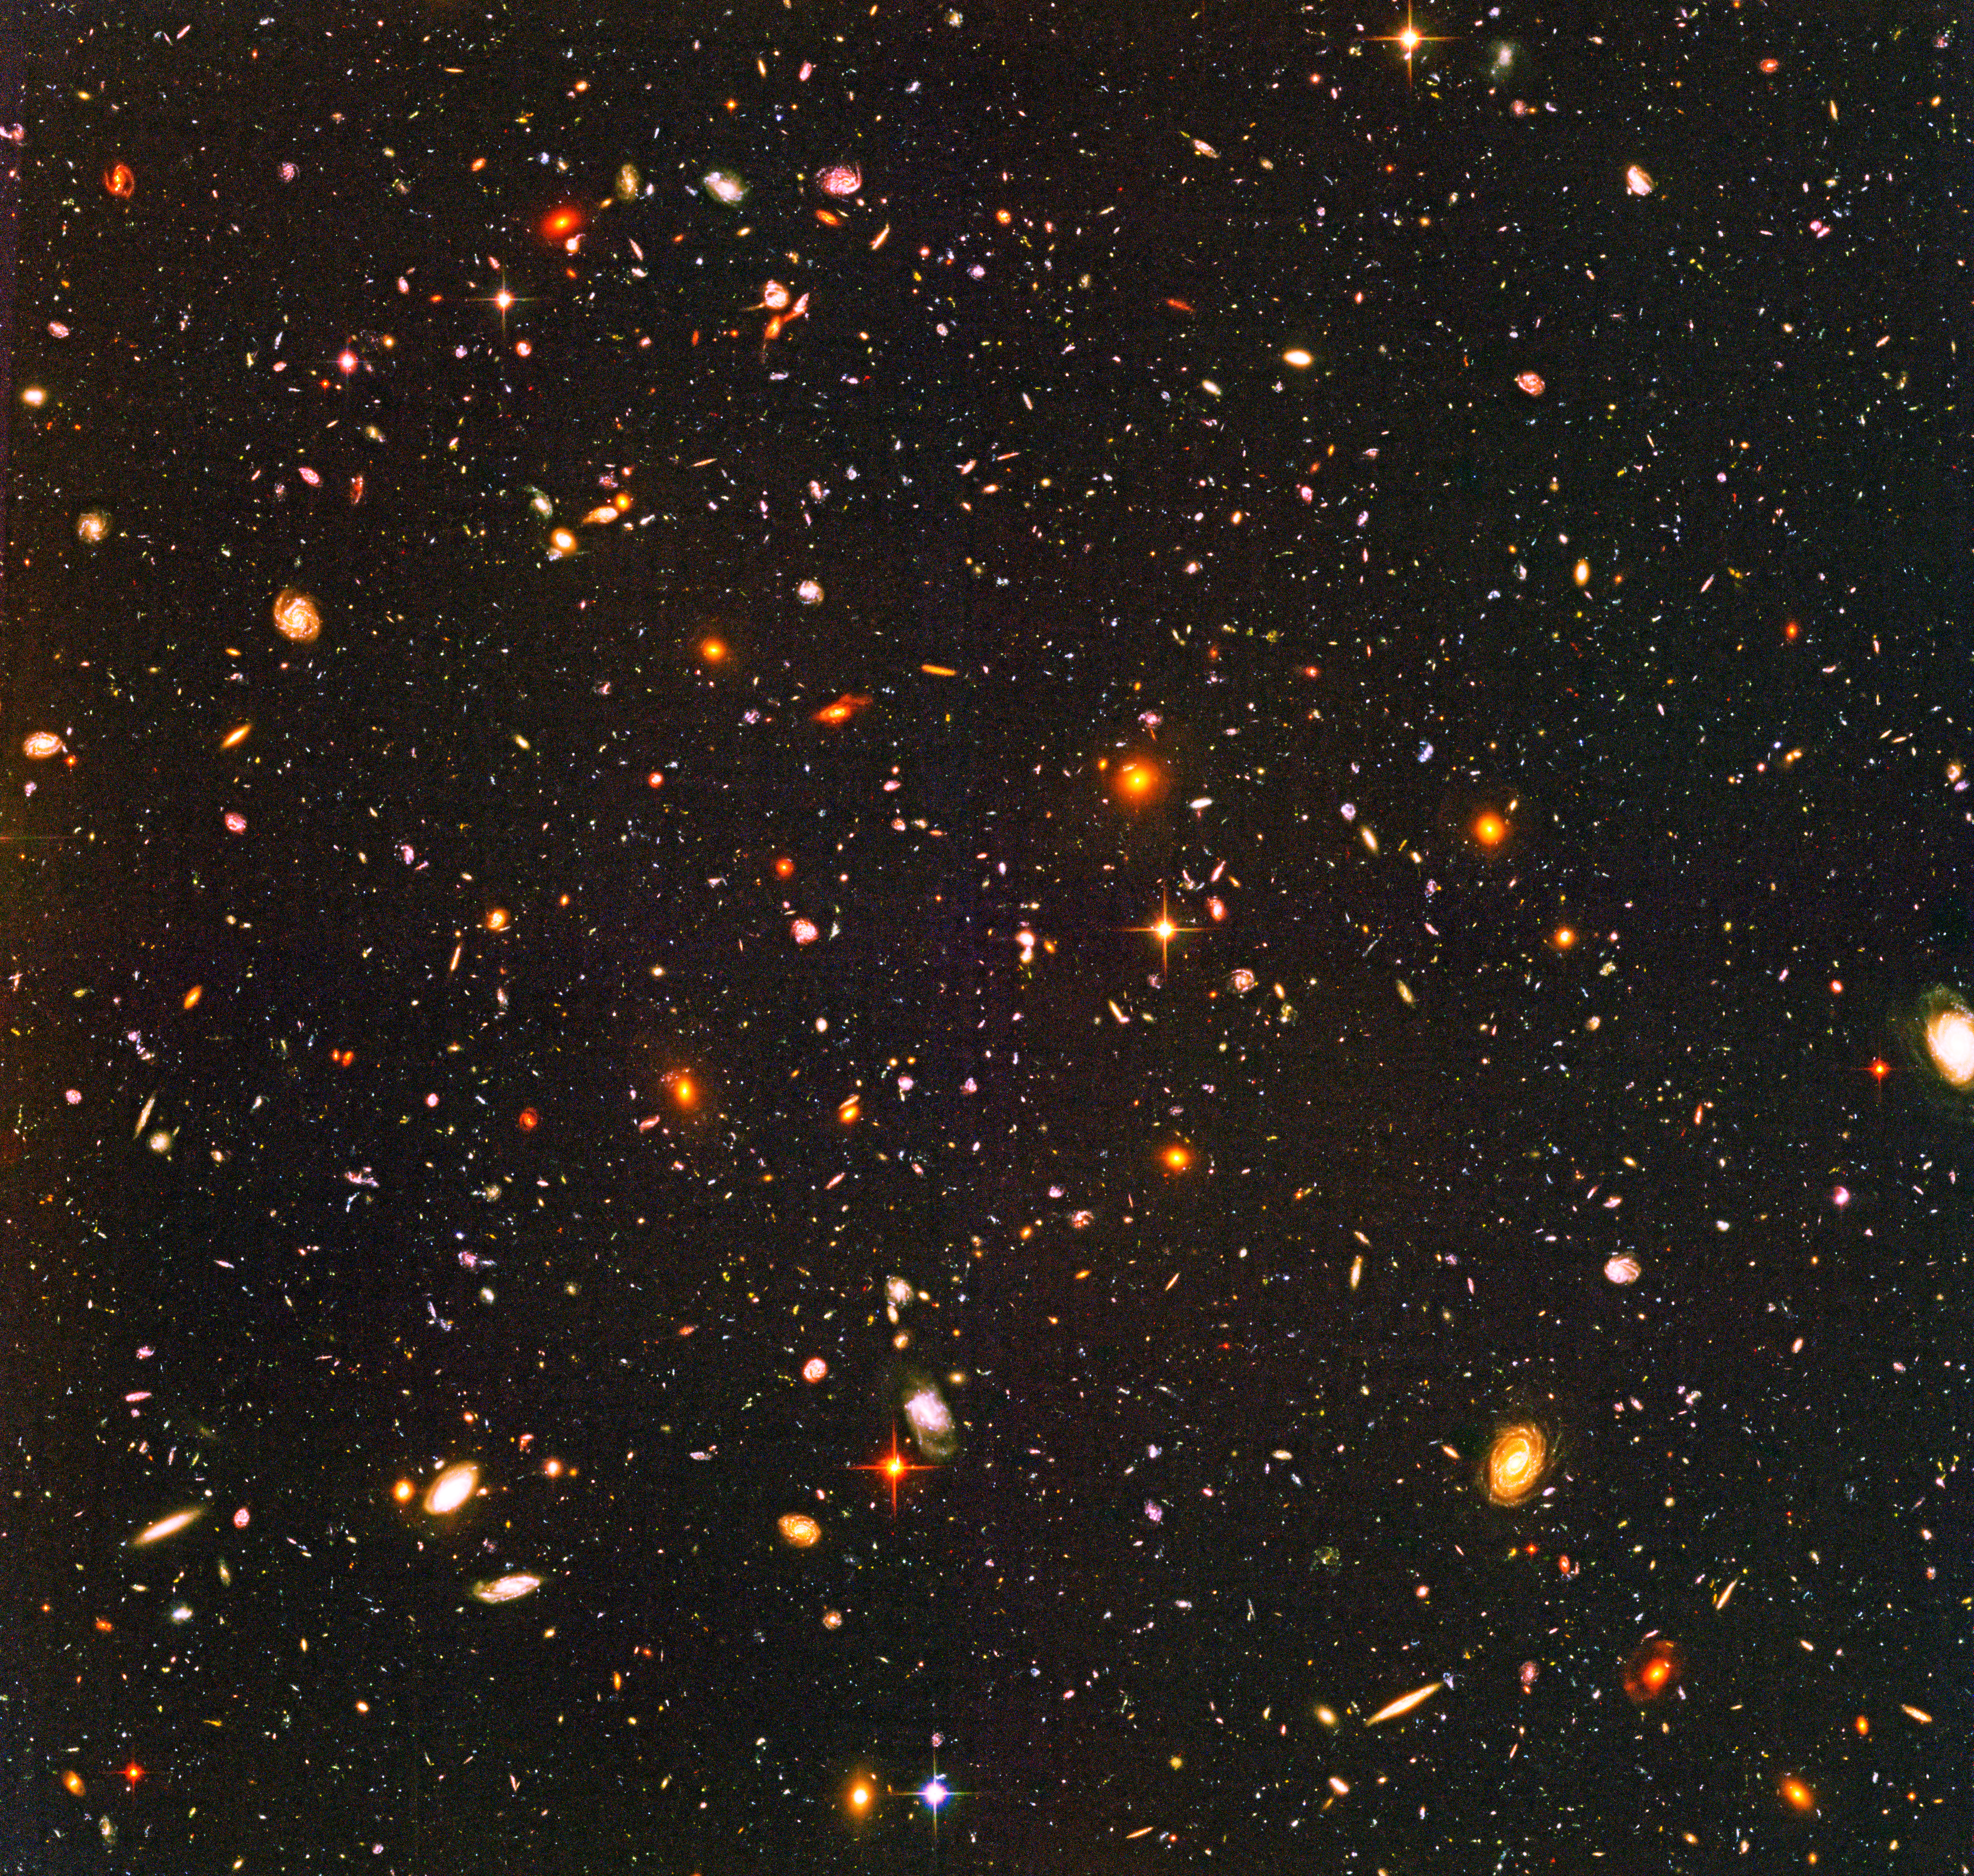

Most-Distant Galaxy Candidates in the Hubble Ultra Deep Field

Detailed analyses of mankind's deepest optical view of the universe, the Hubble Ultra Deep Field (HUDF), by several expert teams have at last identified what may turn out to be some of the earliest star-forming galaxies. The sensitivity of Hubble's Advanced Camera for Surveys (ACS), combined with the penetrating power of the Near Infrared Camera and Multi-Object Spectrometer (NICMOS), finally revealed these long-sought faint galaxies. The HUDF shows that close to a billion years after the big bang the early universe was filled with dwarf galaxies, but no fully formed galaxies like our Milky Way. After careful analysis, they have been sorted out as between 54 and 108 dim, red smudges sprinkled across the HUDF image. This image shows the full sample of candidates circled in green. Three enlargements at right show several dwarf objects that are at the limits of Hubble's present instrument capabilities. The HUDF is a small region of sky in the direction of the southern constellation Fornax. The faintest objects are less than one four-billionth the brightness of stars that can be seen with the naked eye. Their light has taken nearly 13 billion years to reach Earth, and so these objects represent some of the earliest star-forming galaxies to form in the universe.

Credit: NASA, ESA, R. Windhorst (Arizona State University) and H. Yan (Spitzer Science Center, Caltech)